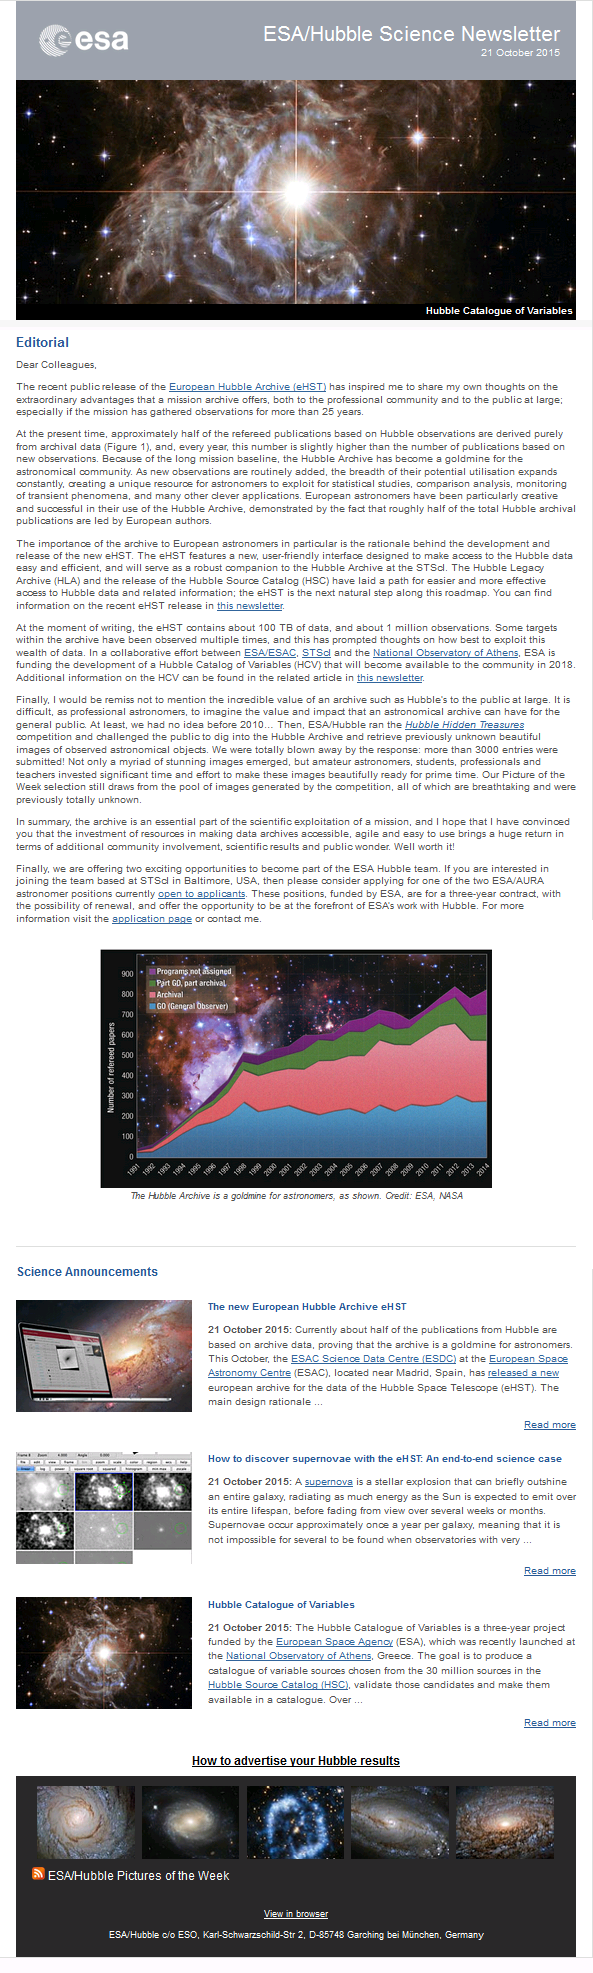

Screenshot of the October 2015 issue of ESA/Hubble Science Newsletter

Screenshot of the October 2015 issue of ESA/Hubble Science Newsletter

Credit: NASA & ESA